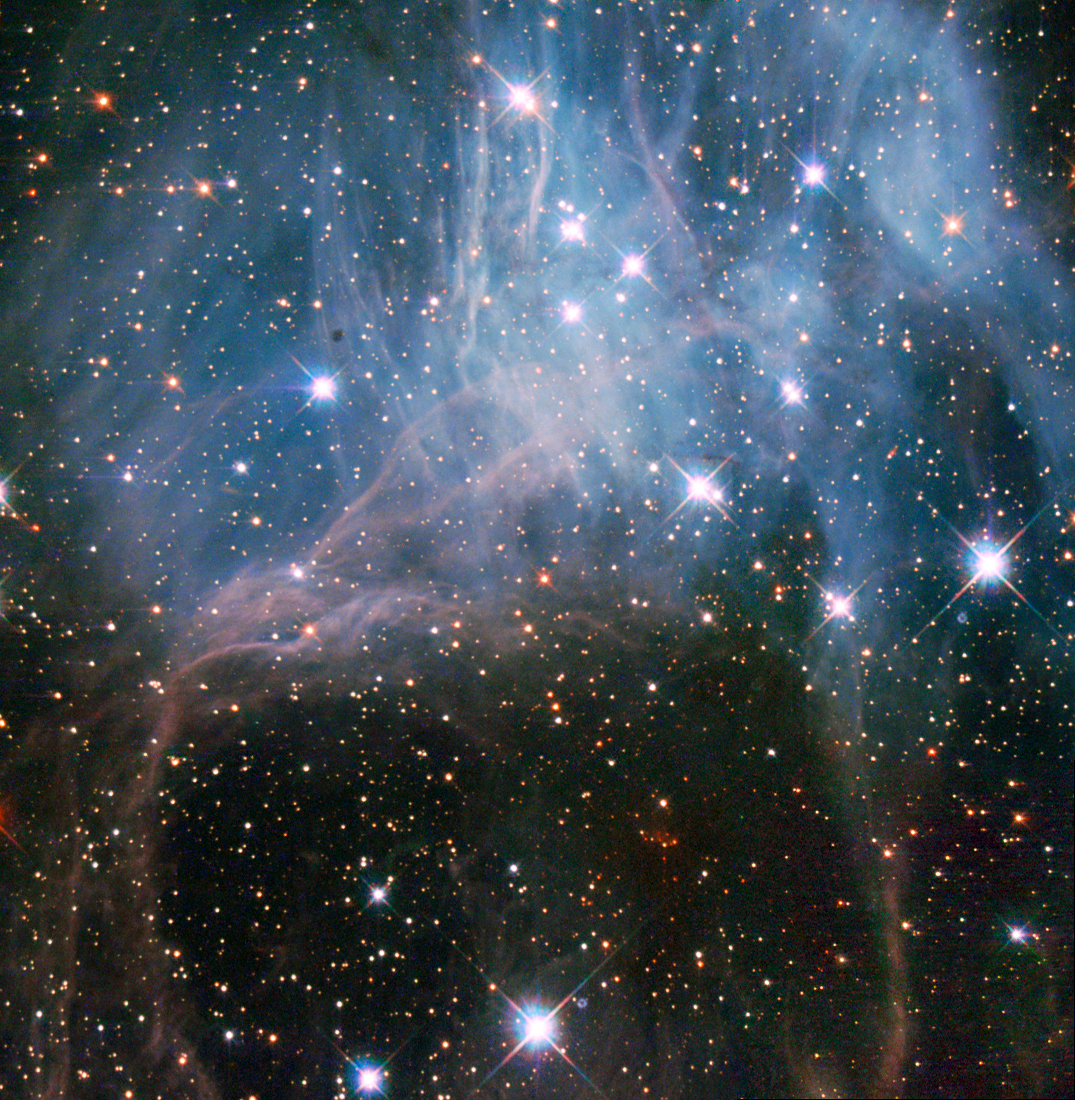

Hubble peeks inside a stellar cloud

These bright stars shining through what looks like a haze in the night sky are part of a young stellar grouping in one of the largest known star formation regions of the Large Magellanic Cloud (LMC), a dwarf satellite galaxy of the Milky Way. The image was captured by the NASA/ESA Hubble Space Telescope’s Wide Field Planetary Camera 2.

The stellar grouping is known to stargazers as NGC 2040 or LH 88. It is essentially a very loose star cluster whose stars have a common origin and are drifting together through space. There are three different types of stellar associations defined by their stellar properties. NGC 2040 is an OB association, a grouping that usually contains 10–100 stars of type O and B — these are high-mass stars that have short but brilliant lives. It is thought that most of the stars in the Milky Way were born in OB associations.

There are several such groupings of stars in the LMC, including one previously featured as a Hubble Picture of the Week. Just like the others, LH 88 consists of several high-mass young stars in a large nebula of partially ionised hydrogen gas, and lies in what is known to be a supergiant shell of gas called LMC 4.

Over a period of several million years, thousands of stars may form in these supergiant shells, which are the largest interstellar structures in galaxies. The shells themselves are believed to have been created by strong stellar winds and clustered supernova explosions of massive stars that blow away surrounding dust and gas, and in turn trigger further episodes of star formation.

The LMC is the third closest galaxy to our Milky Way. It is located some 160 000 light-years away, and is about 100 times smaller than our own.

This image, which shows ultraviolet, visible and infrared light, covers a field of view of approximately 1.8 by 1.8 arcminutes.

A version of this image was entered into the Hubble’s Hidden Treasures Image Processing Competition by contestant Eedresha Sturdivant. Hidden Treasures is an initiative to invite astronomy enthusiasts to search the Hubble archive for stunning images that have never been seen by the general public.

Credit: ESA/Hubble, NASA and D. A Gouliermis. Acknowledgement: Flickr user Eedresha Sturdivant